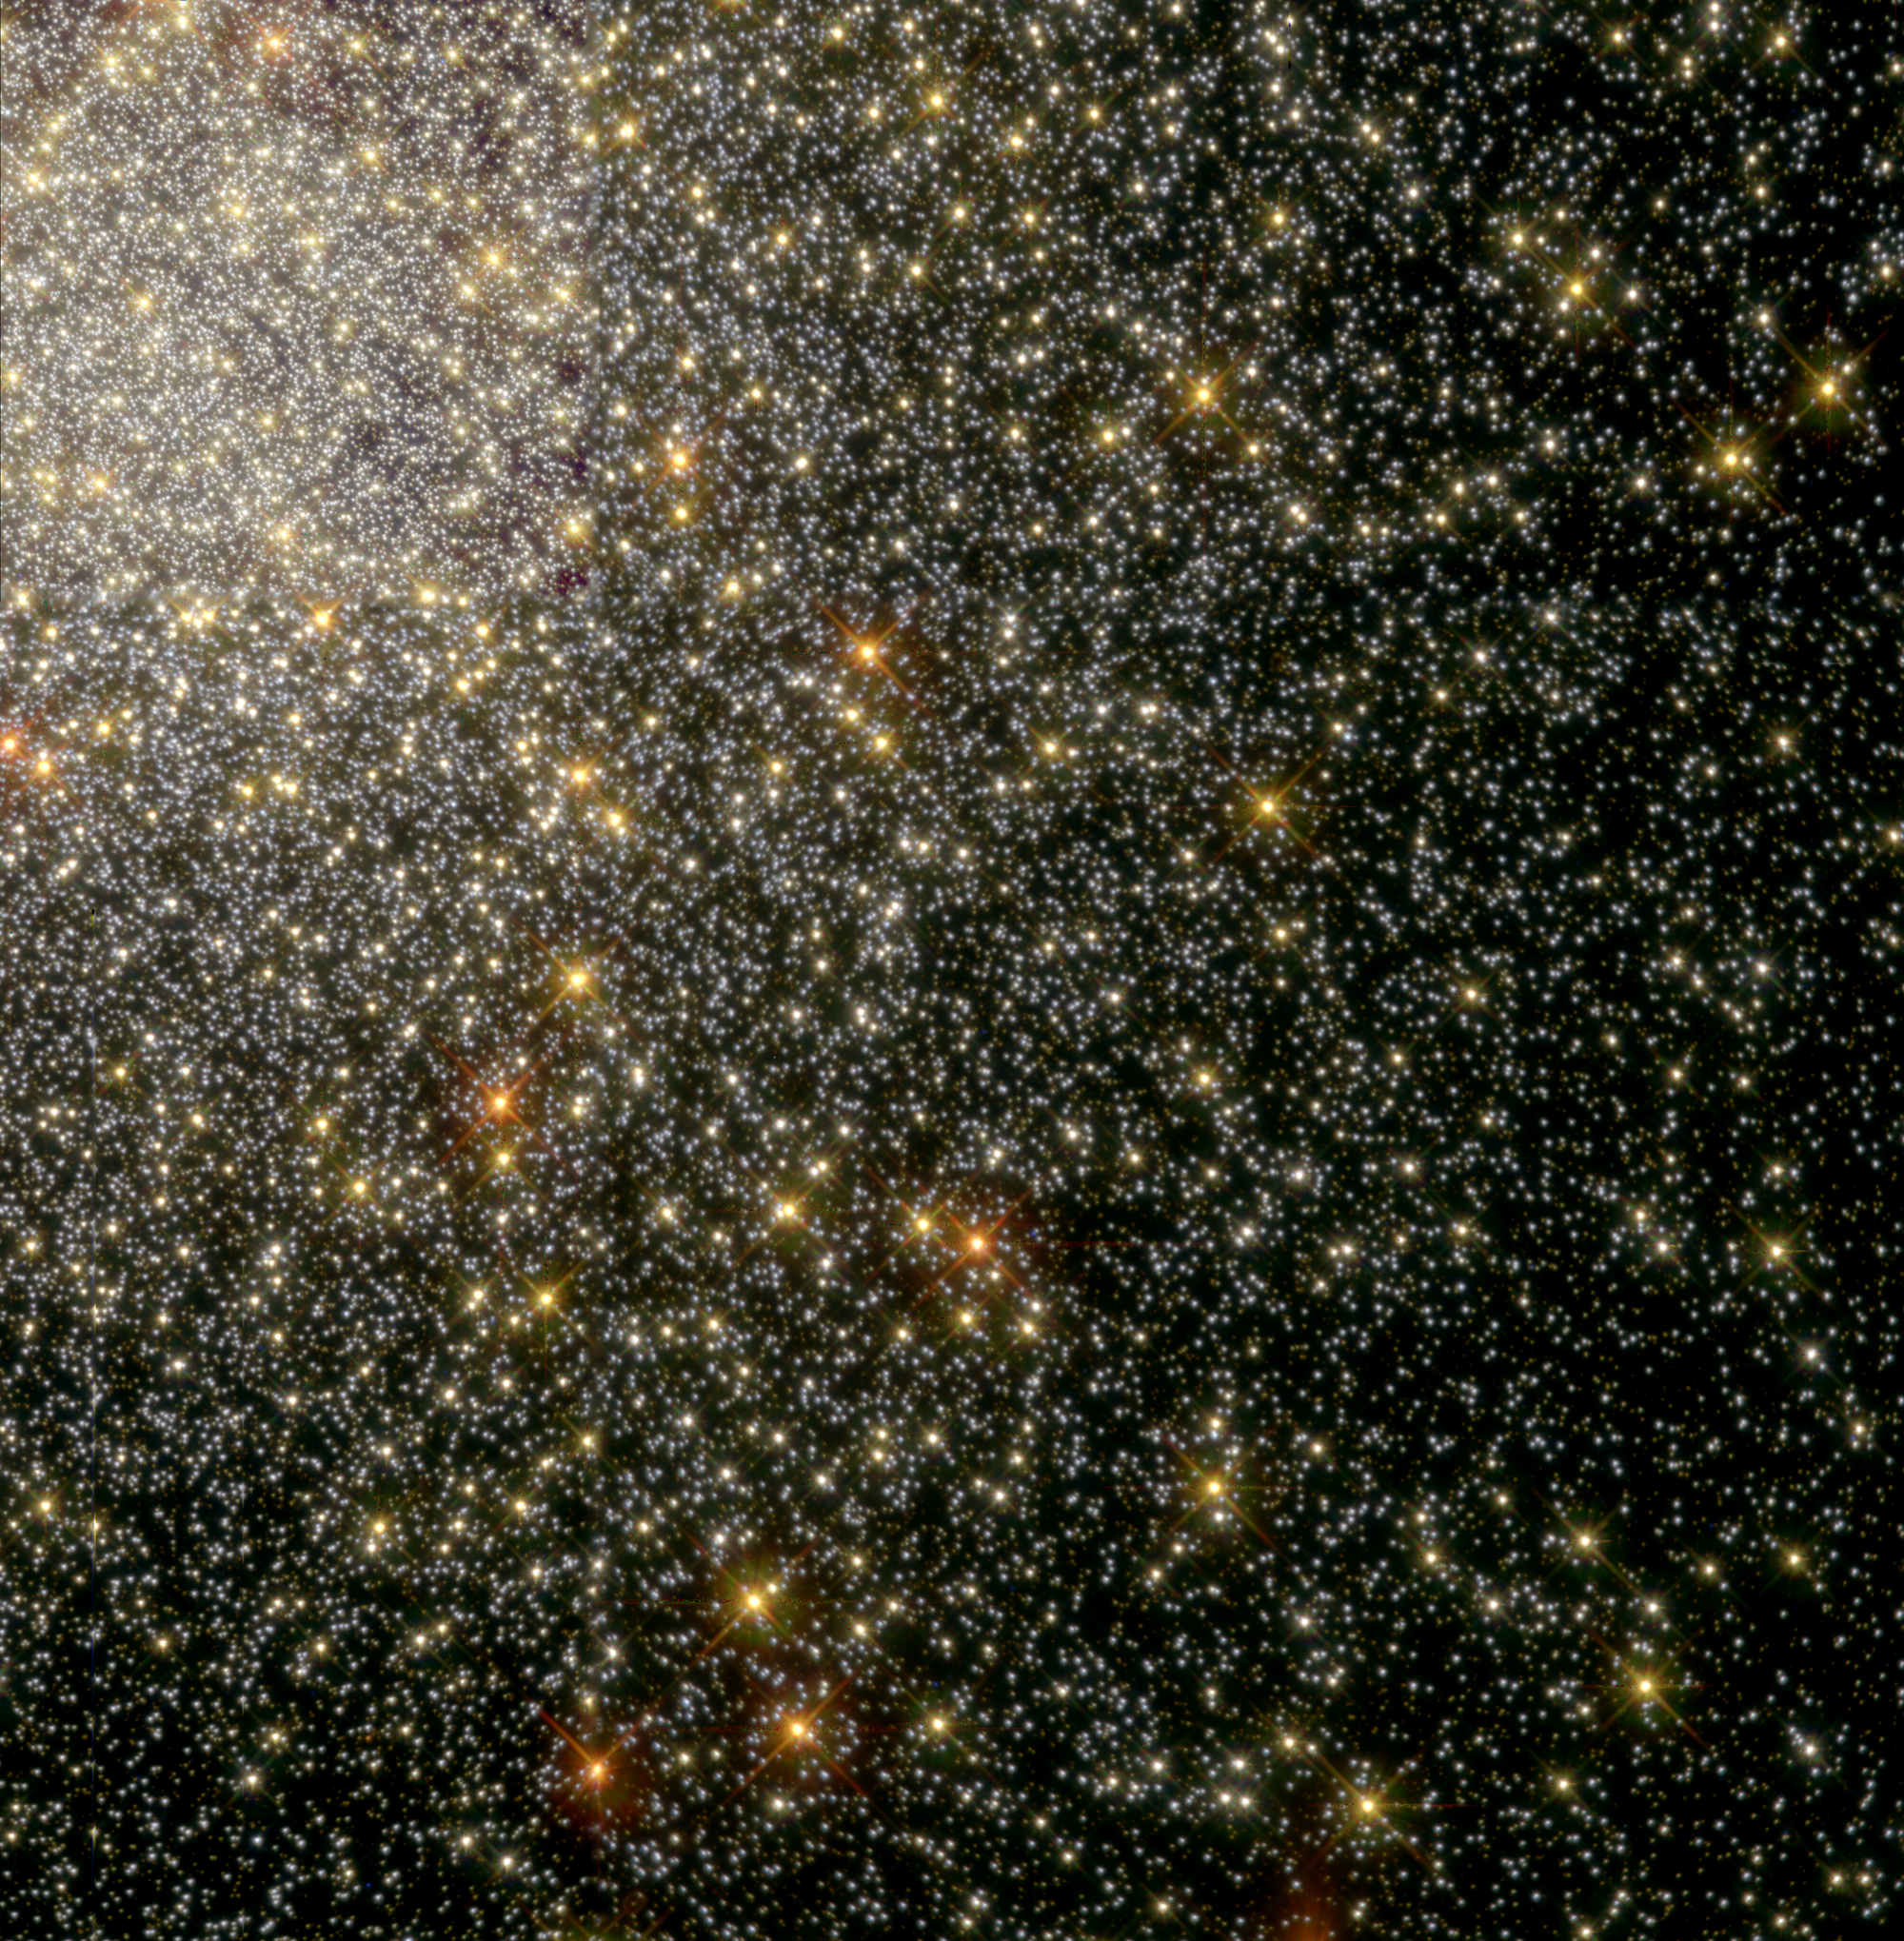

City of Stars - 47 Tucanae (WFPC-2 Image)

This image shows the Hubble telescope's close-up look at a swarm of 35, 000 stars near the cluster's central region. The stars are tightly packed together: They are much closer together than our Sun and its closest stars.

The picture, taken by the Wide Field and Planetary Camera 2, depicts the stars' natural colours and tells scientists about their composition and age. For example, the red stars denote bright red giants nearing the end of their lives; the more common yellow stars are similar to our middle-aged Sun.

Credit: Ron Gilliland ( Space Telescope Science Institute) and NASA/ESA